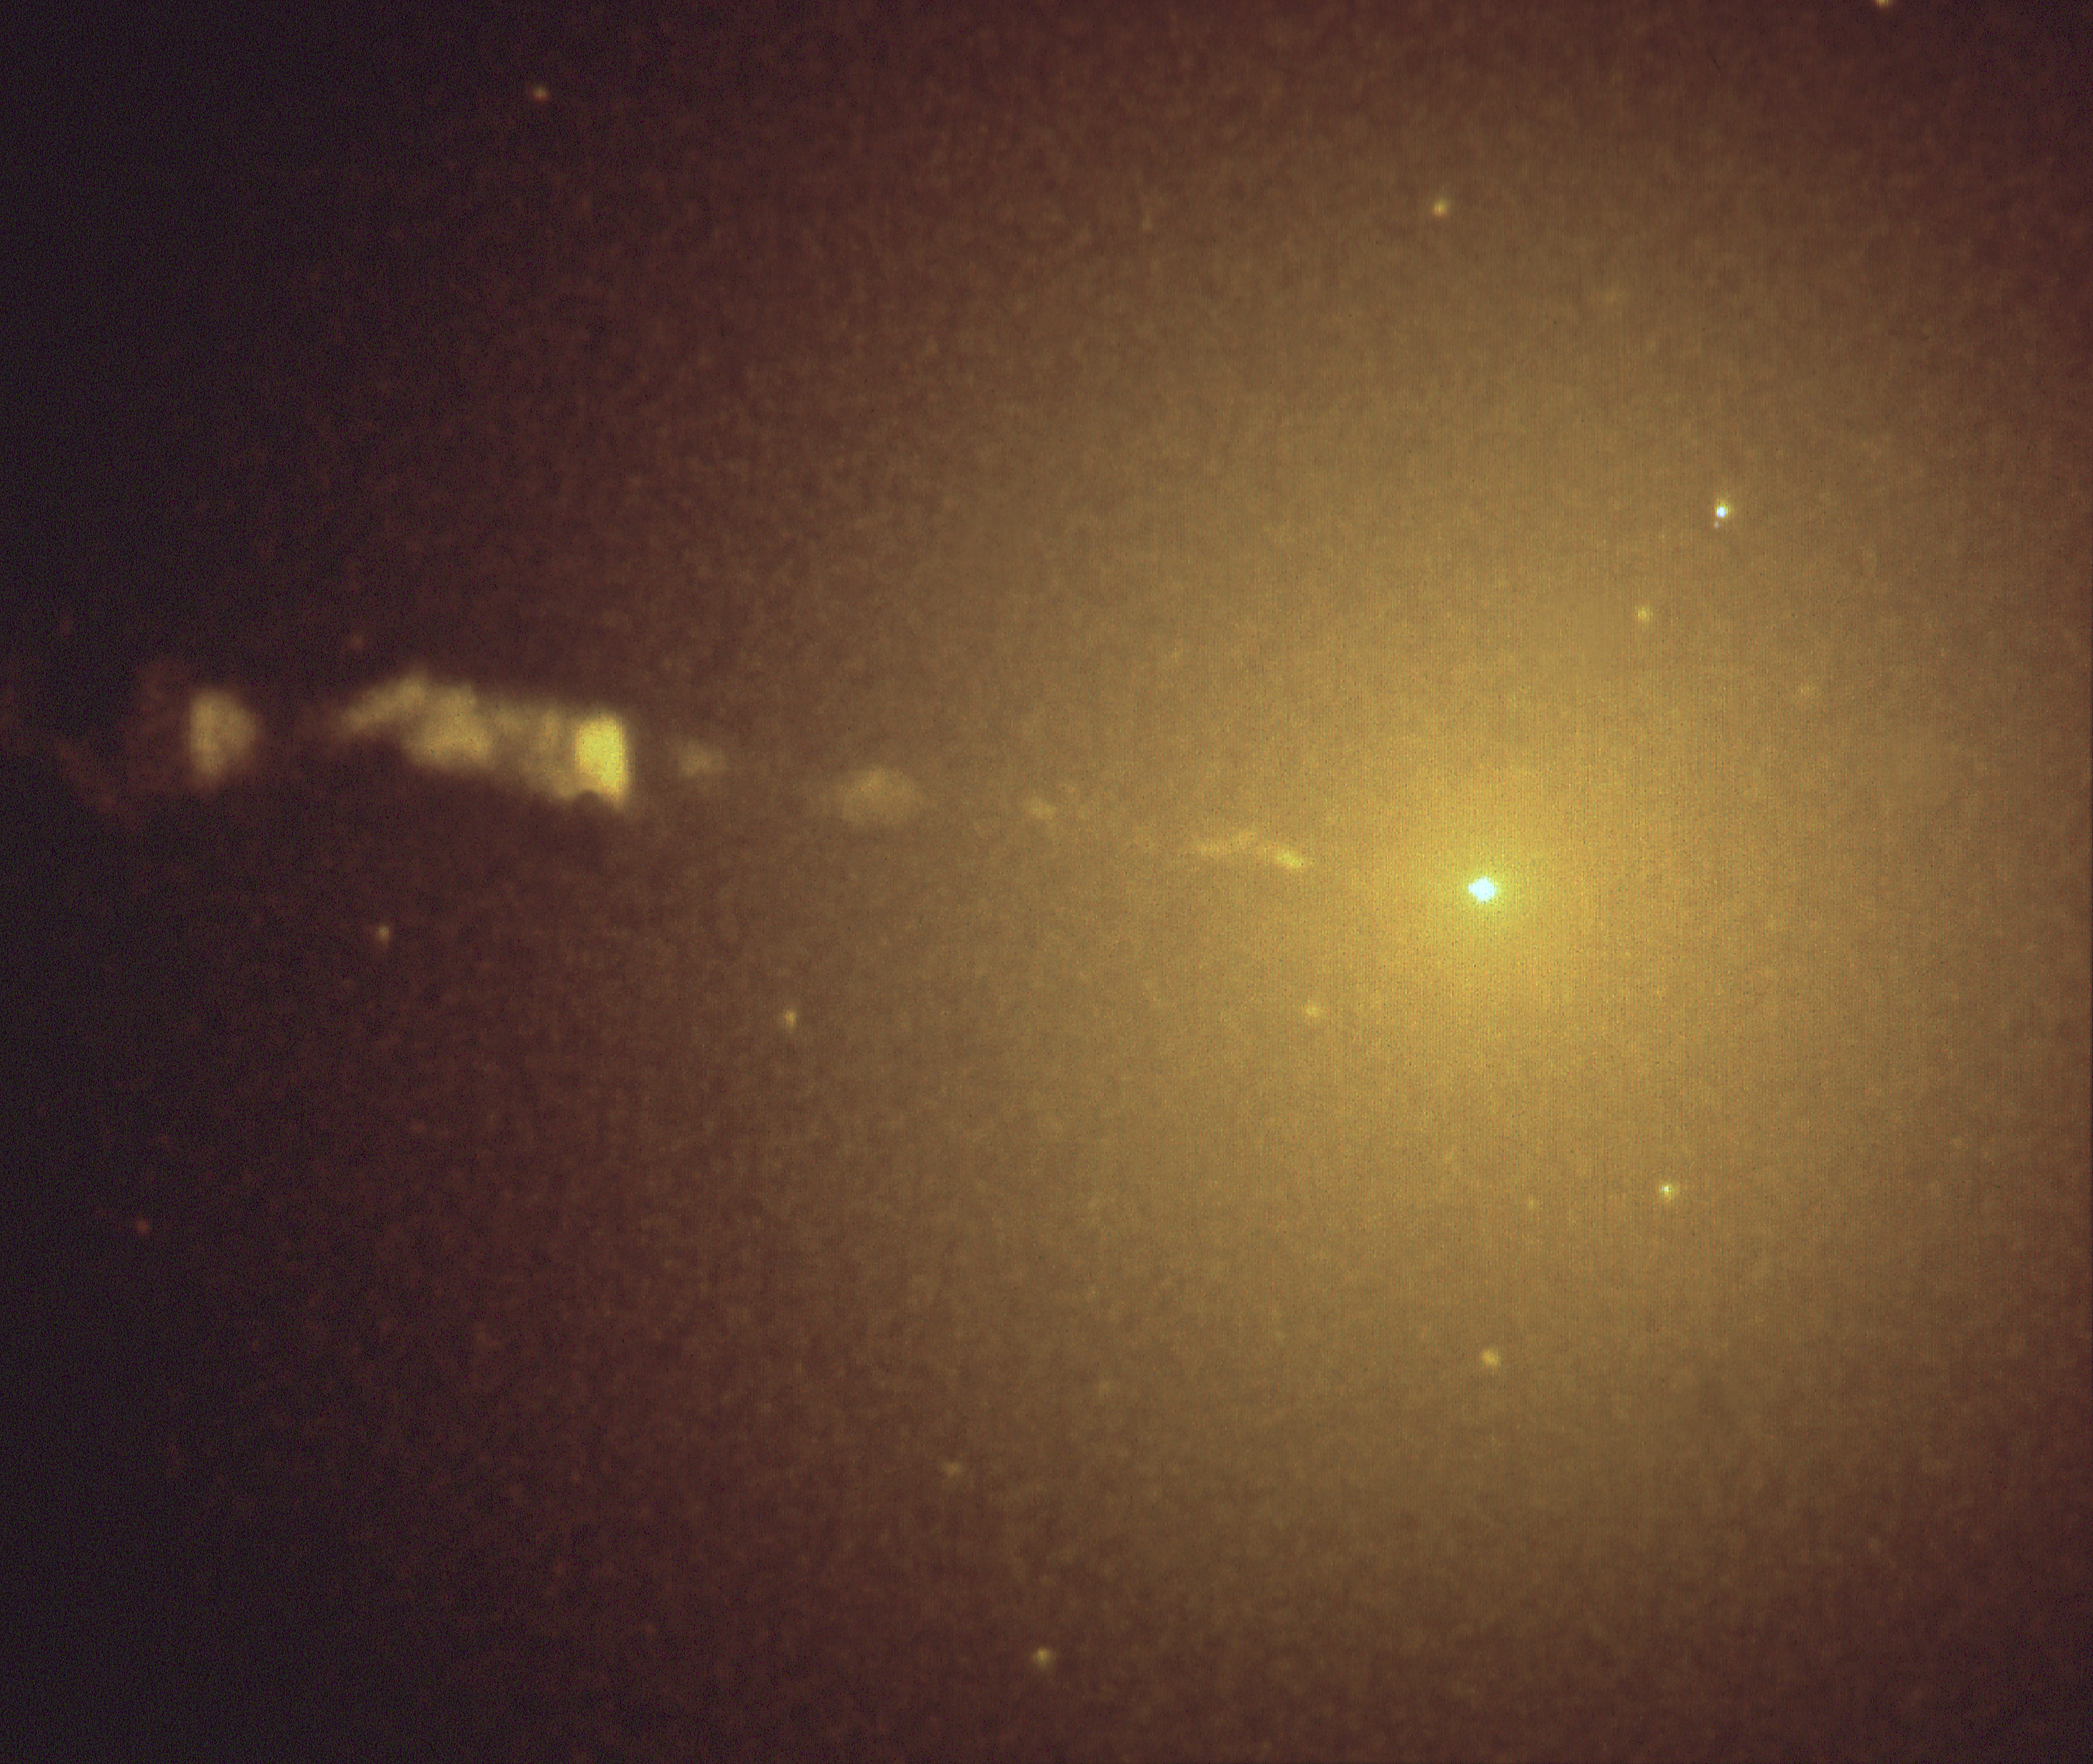

Compact core of galaxy M87

NASA/ESA Hubble Space Telescope clearly shows the central core and accompanying jet of the giant elliptical galaxy M87. This near-infrared image was taken with HST's Wide Field and Planetary Camera (WF/PC), in high resolution mode, on June 1, 1991. The image is being presented on Thursday, January 16th at the 179th meeting of the American Astronomical Society in Atlanta, Georgia.

The steady increase in brightness of M87 towards its center is readily apparent in the image, showing that the stars in MS7 are strongly concentrated towards its nucleus, as if drawn into the center and held there by the gravitational field of a massive black hole. Theoretical models suggest that the structure of Mg7 is consistent with a central 2.6 billion solar mass black hole. High resolution spectroscopic observations are now needed to confirm this possibility.

Credit: Tod R. Lauer (NOAO), Sandra M. Faber (CSC), C. Roger Lynds (NOAO), and the Wide Field/Planetary Camera Imaging Team.